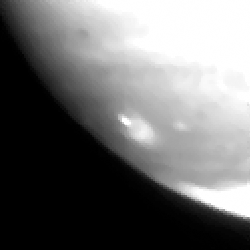

Fragment a impact site

This image shows the fragment A impact site.

Credit: Hubble Space Telescope Comet Team, and NASA/ESA